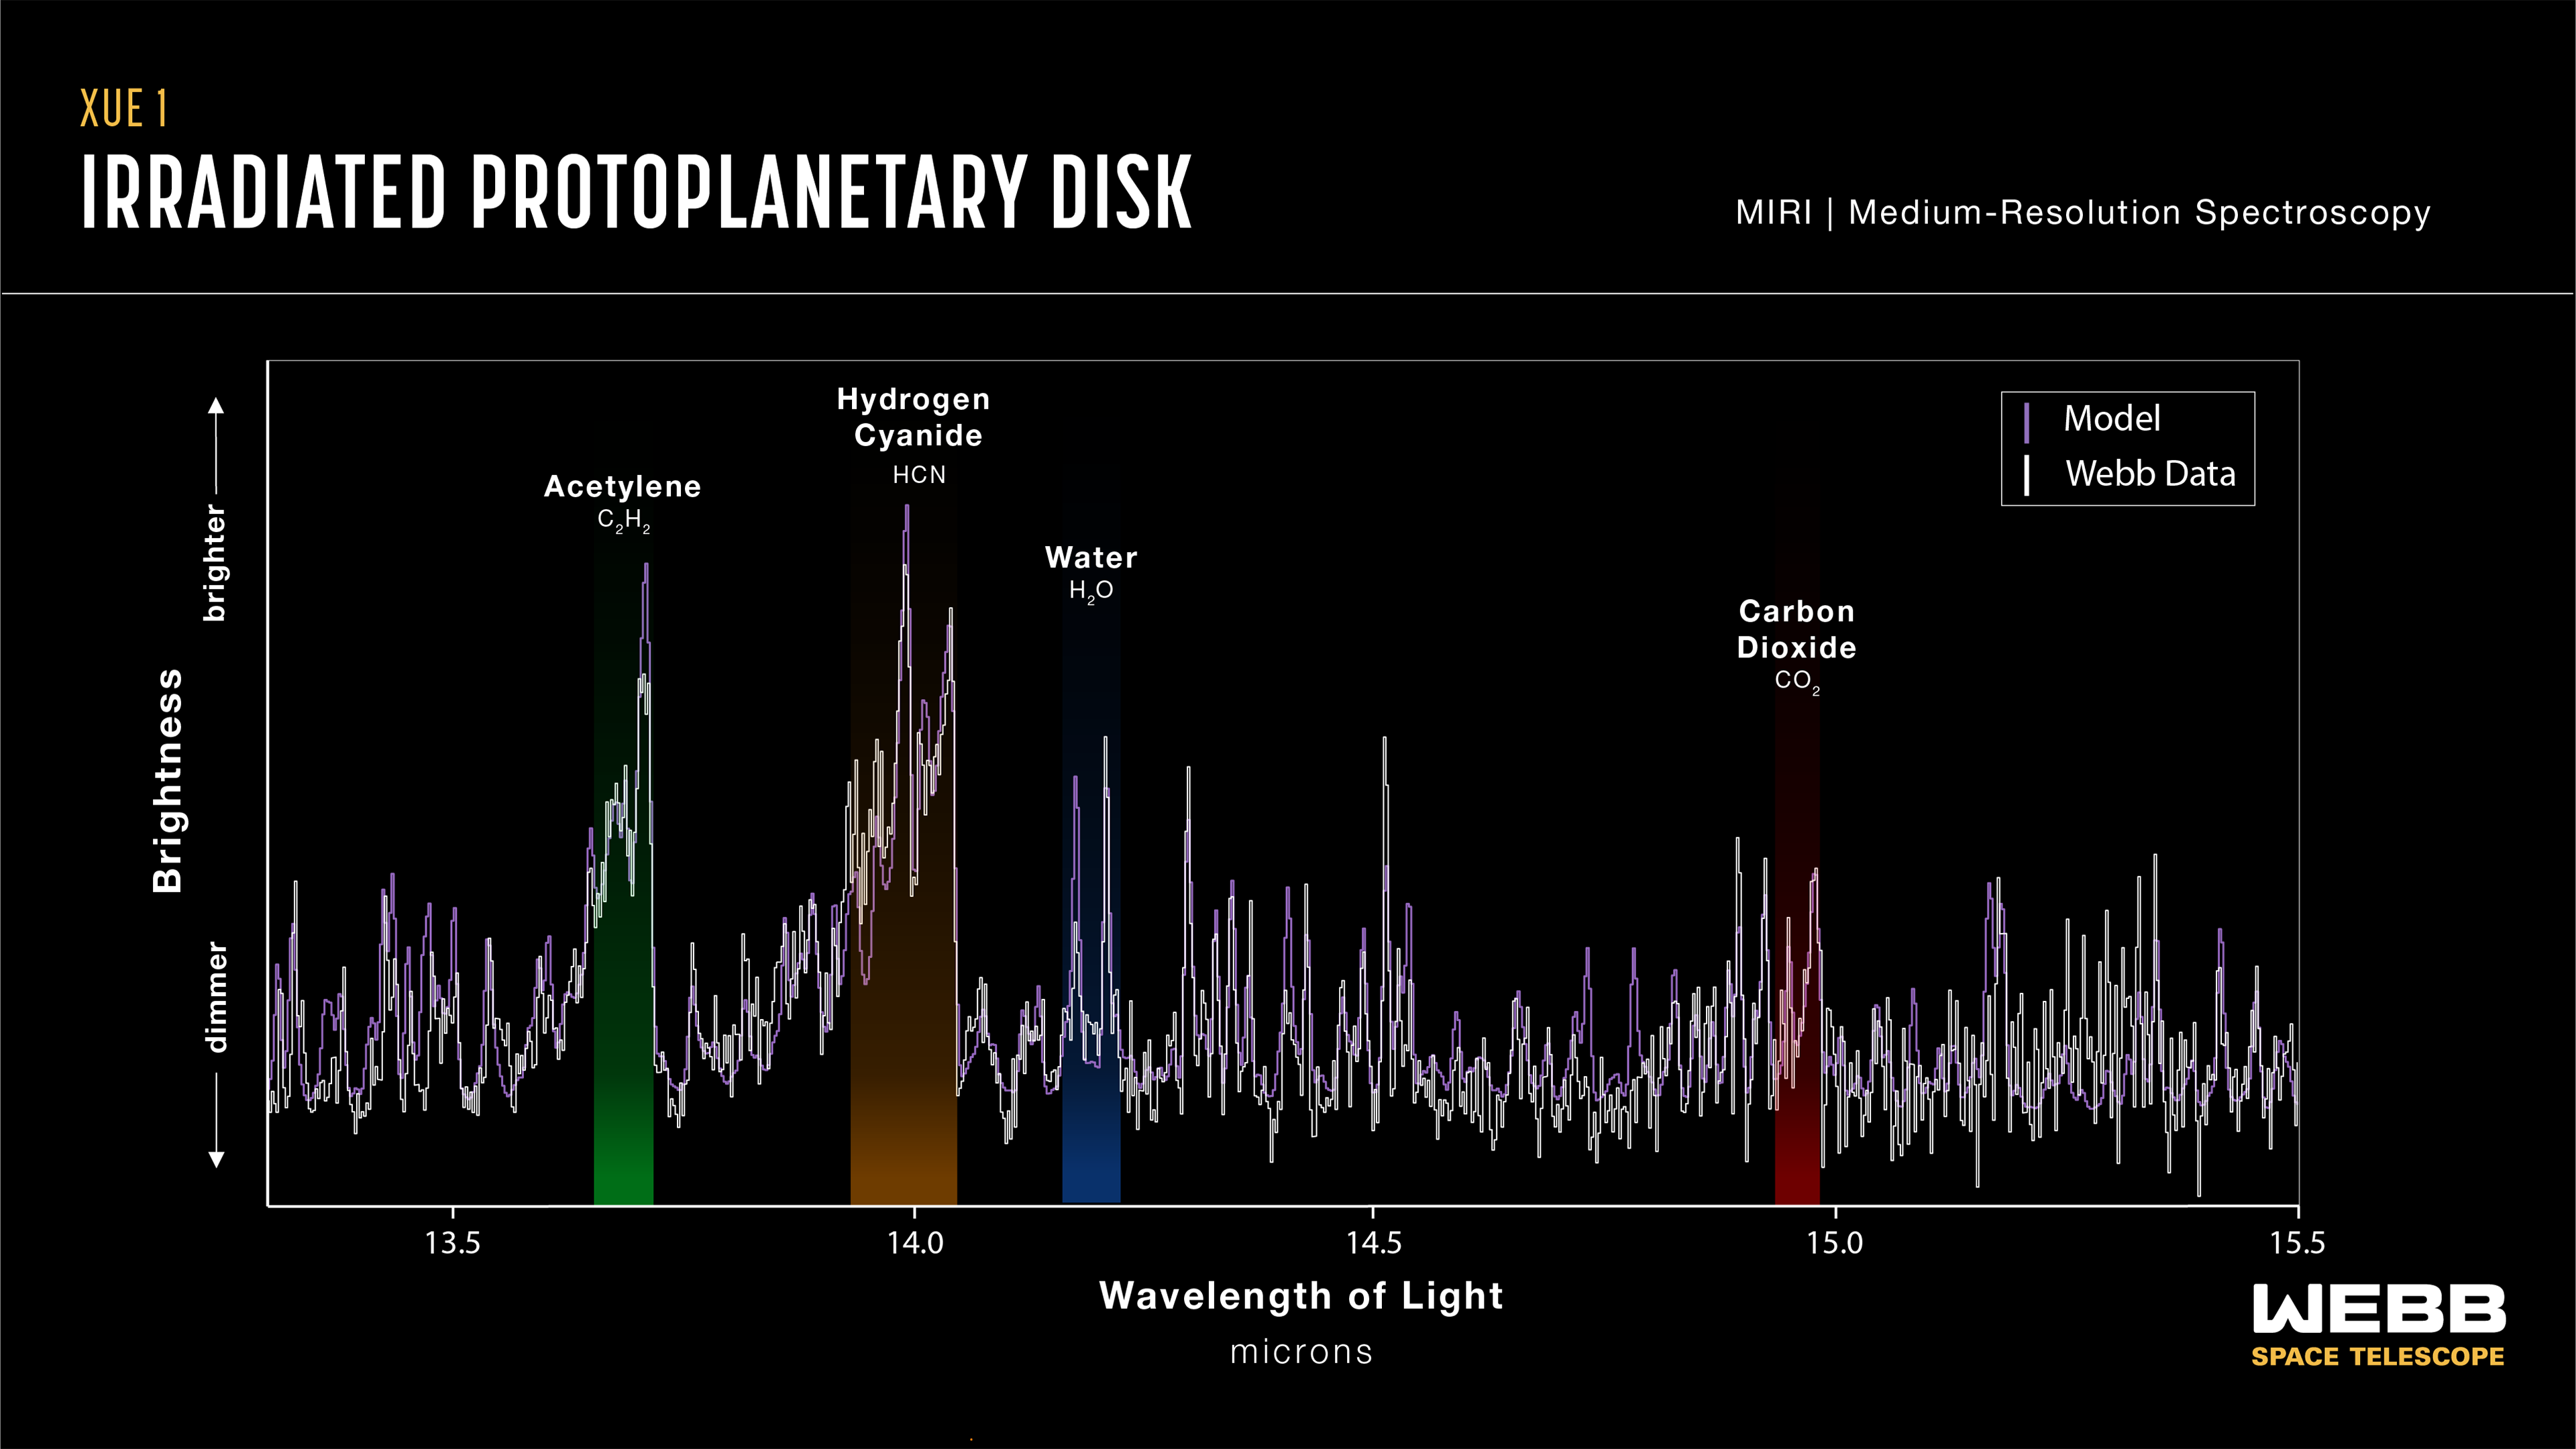

Protoplanetary disc XUE 1 (MIRI emission spectrum: 13.3–15.5 microns)

This graphic presents some of the first results from the eXtreme UV Environments (XUE) James Webb Space Telescope programme. These results suggest that the conditions for rocky-planet formation, typically found in the discs of low-mass star-forming regions, can also occur in massive-star-forming regions and possibly a broader range of environments.

Astronomers focussed on rocky-planet-forming regions of discs in the Lobster Nebula using Webb’s Medium Resolution Spectrometer (MRS) of the Mid-InfraRed Instrument (MIRI). This first result focuses on the protoplanetary disc termed XUE 1, which is located in the star cluster Pismis 24.

The inner disc around XUE 1 revealed signatures of water (highlighted here in blue and centred around 14.2 microns), as well as acetylene (C2H2, highlighted in green; centred around 13.7 microns), hydrogen cyanide (HCN, highlighted in brown; centred around 14.0 microns), and carbon dioxide (CO2, highlighted in red; centred around 14.95 microns). As indicated, some of the emission detected was weaker than some of the predicted models, which might imply a small outer disc radius.

Credit: NASA, ESA, CSA, STScI, J. Olmsted (STScI), M. C Ramírez-Tannus (Max Planck Institute for Astronomy)